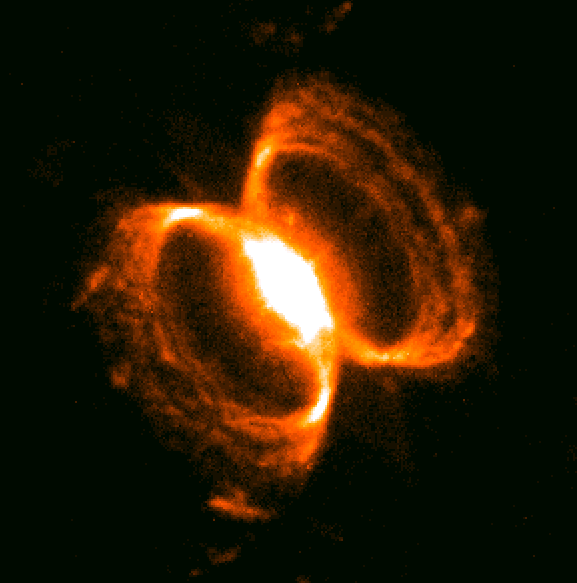

Southern Crab Nebula

A tempestuous relationship between an unlikely pair of stars may have created an oddly shaped, gaseous nebula that resembles an hourglass nestled within an hourglass.

This image shows the small nebula that is embedded in the centre of the larger one (you can see the whole nebula by searching for opo9932a in the search form).

Credit: Romano Corradi, Instituto de Astrofisica de Canarias, Tenerife, Spain; Mario Livio, Space Telescope Science Institute, Baltimore, Md.; Ulisse Munari, Osservatorio Astronomico di Padova-Asiago, Italy; HugoSchwarz, Nordic Optical Telescope, Canarias, Spain; and NASA/ESA